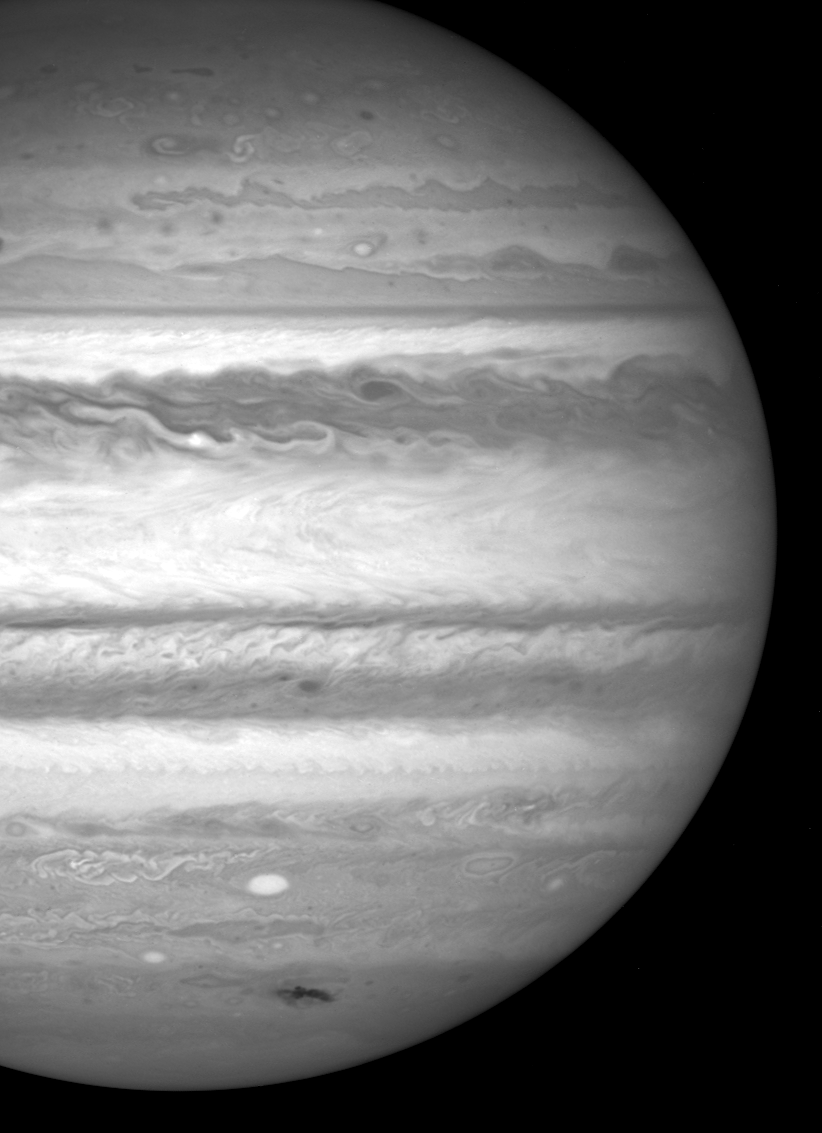

Hubble view of Jupiter

Hubble view of Jupiter.

Credit: NASA, ESA and H. Hammel (Space Science Institute, Boulder, Colorado) and the Jupiter Comet Impact Team